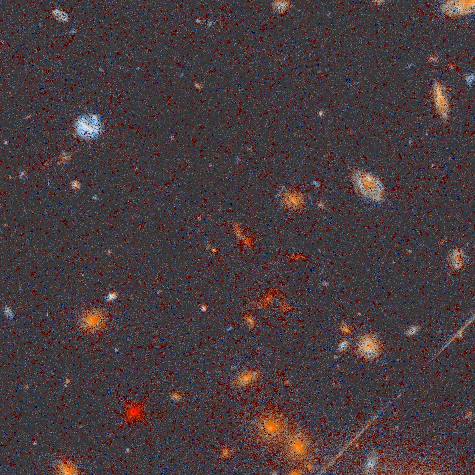

Distant galaxy cluster HST133617-00529

This collection of spiral and elliptical galaxies lies an estimated 4 to 6 billion light-years away. It is in the constellation of Virgo not far from the 3rd magnitude star Zeta Virginis. The brighter galaxies in this cluster have red magnitudes between 20 and 22 near the limit of the Palomar Sky Survey. The bright blue galaxy (upper left) is probably a foreground galaxy, and not a cluster member. The larger of the galaxies in the cluster are probably about the size of our Milky Way Galaxy. The diagonal line at lower right is an artificial satellite trail.

Credit: K. Ratnatunga, R. Griffiths (Carnegie Mellon University); and NASA/ESA